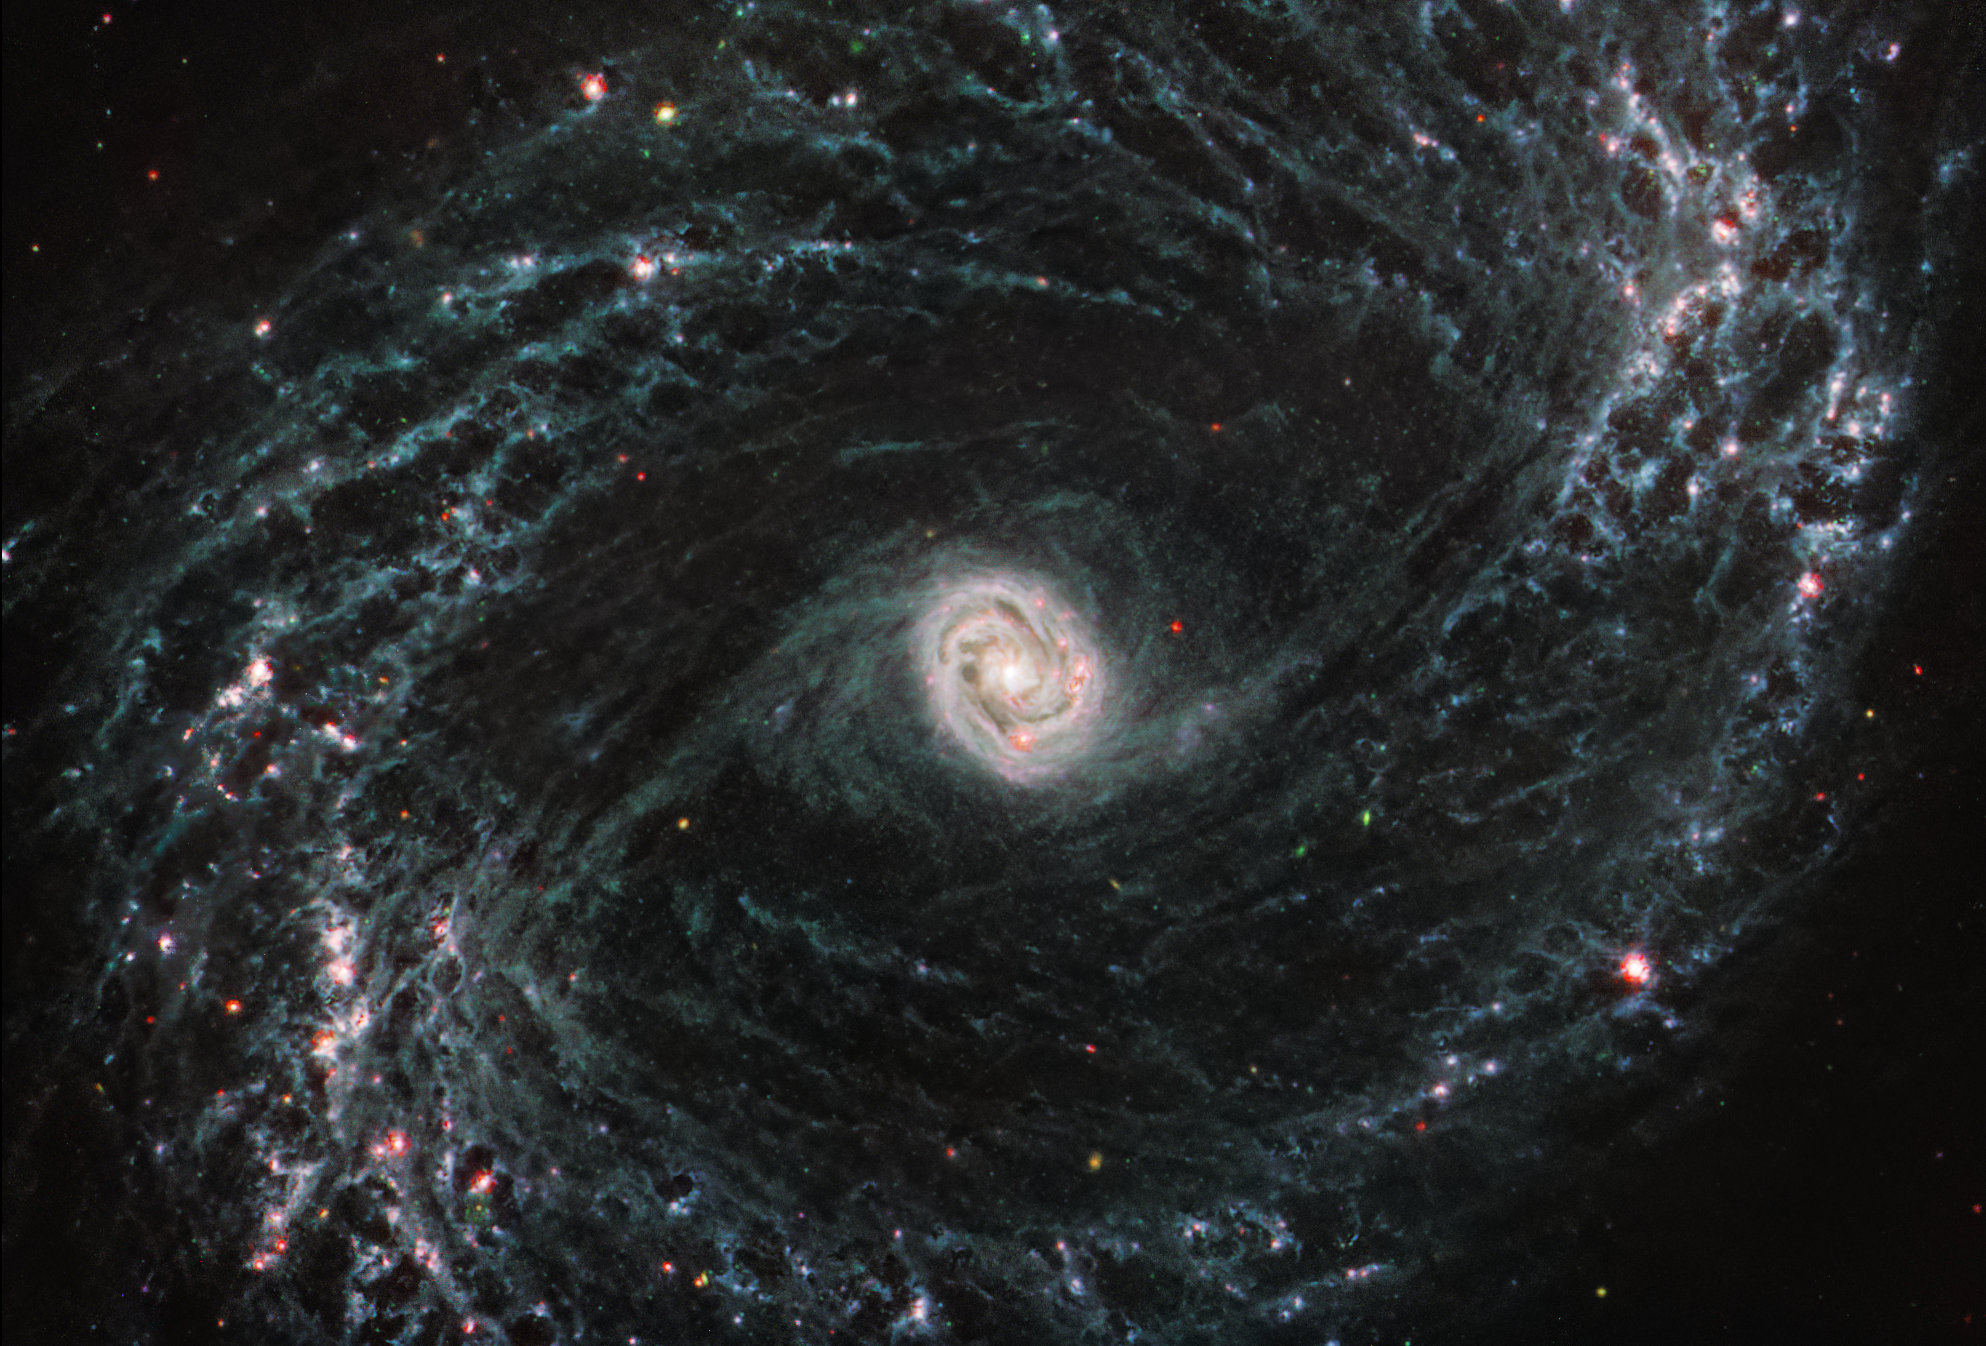

NGC 1433 (MIRI Image)

This image taken by the NASA/ESA/CSA James Webb Space Telescope shows one of a total of 19 galaxies targeted for study by the Physics at High Angular resolution in Nearby Galaxies (PHANGS) collaboration. Nearby barred spiral galaxy NGC 1433 takes on a completely new look when observed by Webb’s Mid-Infrared Instrument (MIRI).

NGC 1433’s spiral arms are littered with evidence of extremely young stars releasing energy and, in some cases, blowing out the gas and dust of the interstellar medium they plough into. Areas that once appeared dark and dim in optical imaging light up under Webb’s infrared eye, as clumps of dust and gas in the interstellar medium absorb the light from forming stars and emit it back out in the infrared.

Webb’s image of NGC1433 is a dramatic display of the role that dynamic processes within the forming stars, dust, and gas play in the larger structure of an entire galaxy.

At the centre of the galaxy, a tight, bright core featuring a unique double ring structure shines in exquisite detail, revealed by Webb’s extreme resolution. In this case, that double ring is actually tightly wrapped spiral arms that wind into an oval shape along the galaxy’s bar axis.

NGC 1433 is classified as a Seyfert galaxy, a galaxy relatively close to Earth that has a bright, active core. The brightness and lack of dust in the MIRI image of NGC 1433 could hint at a recent merger or even collision with another galaxy.
In the image of NGC 1433, blue, green, and red were assigned to Webb’s MIRI data at 7.7, 10 and 11.3, and 21 microns (the F770W, F1000W and F1130W, and F2100W filters, respectively).

MIRI was contributed by ESA and NASA, with the instrument designed and built by a consortium of nationally funded European Institutes (The MIRI European Consortium) and NASA’s Jet Propulsion Laboratory, in partnership with the University of Arizona.

Credit: NASA, ESA, CSA, and J. Lee (NOIRLab), A. Pagan (STScI)